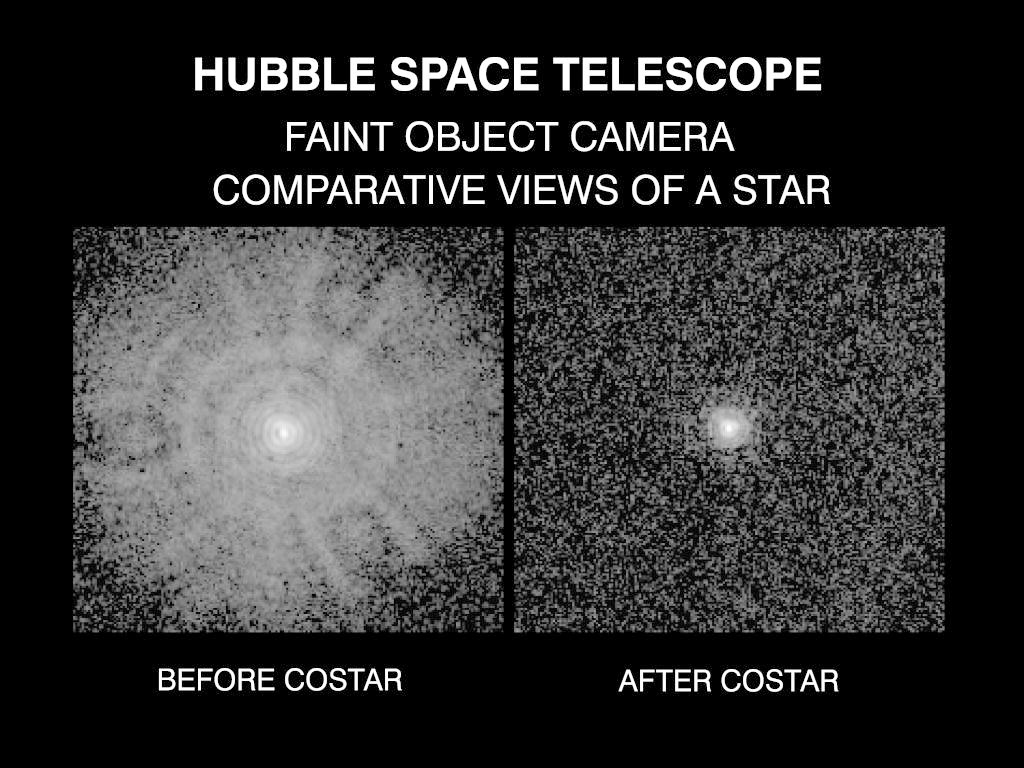

Comparative view of a star before and after the installation of the Corrective Optics Space Telescope Axial Replacement (COSTAR)

This pair of images of a single star, taken with the European Space Agency's Faint Object Camera (FOC), demonstrate that NASA/ESA Hubble Space Telescope has been restored fully to its planned optical performance.

The COSTAR mirrors remove the effect of spherical aberration in the HST's primary mirror. The FOC will now be able to observe extremely faint celestial objects with a clarity and sensitivity unmatched by ground-based telescopes.

Credit: NASA, ESA, and the COSTAR Team